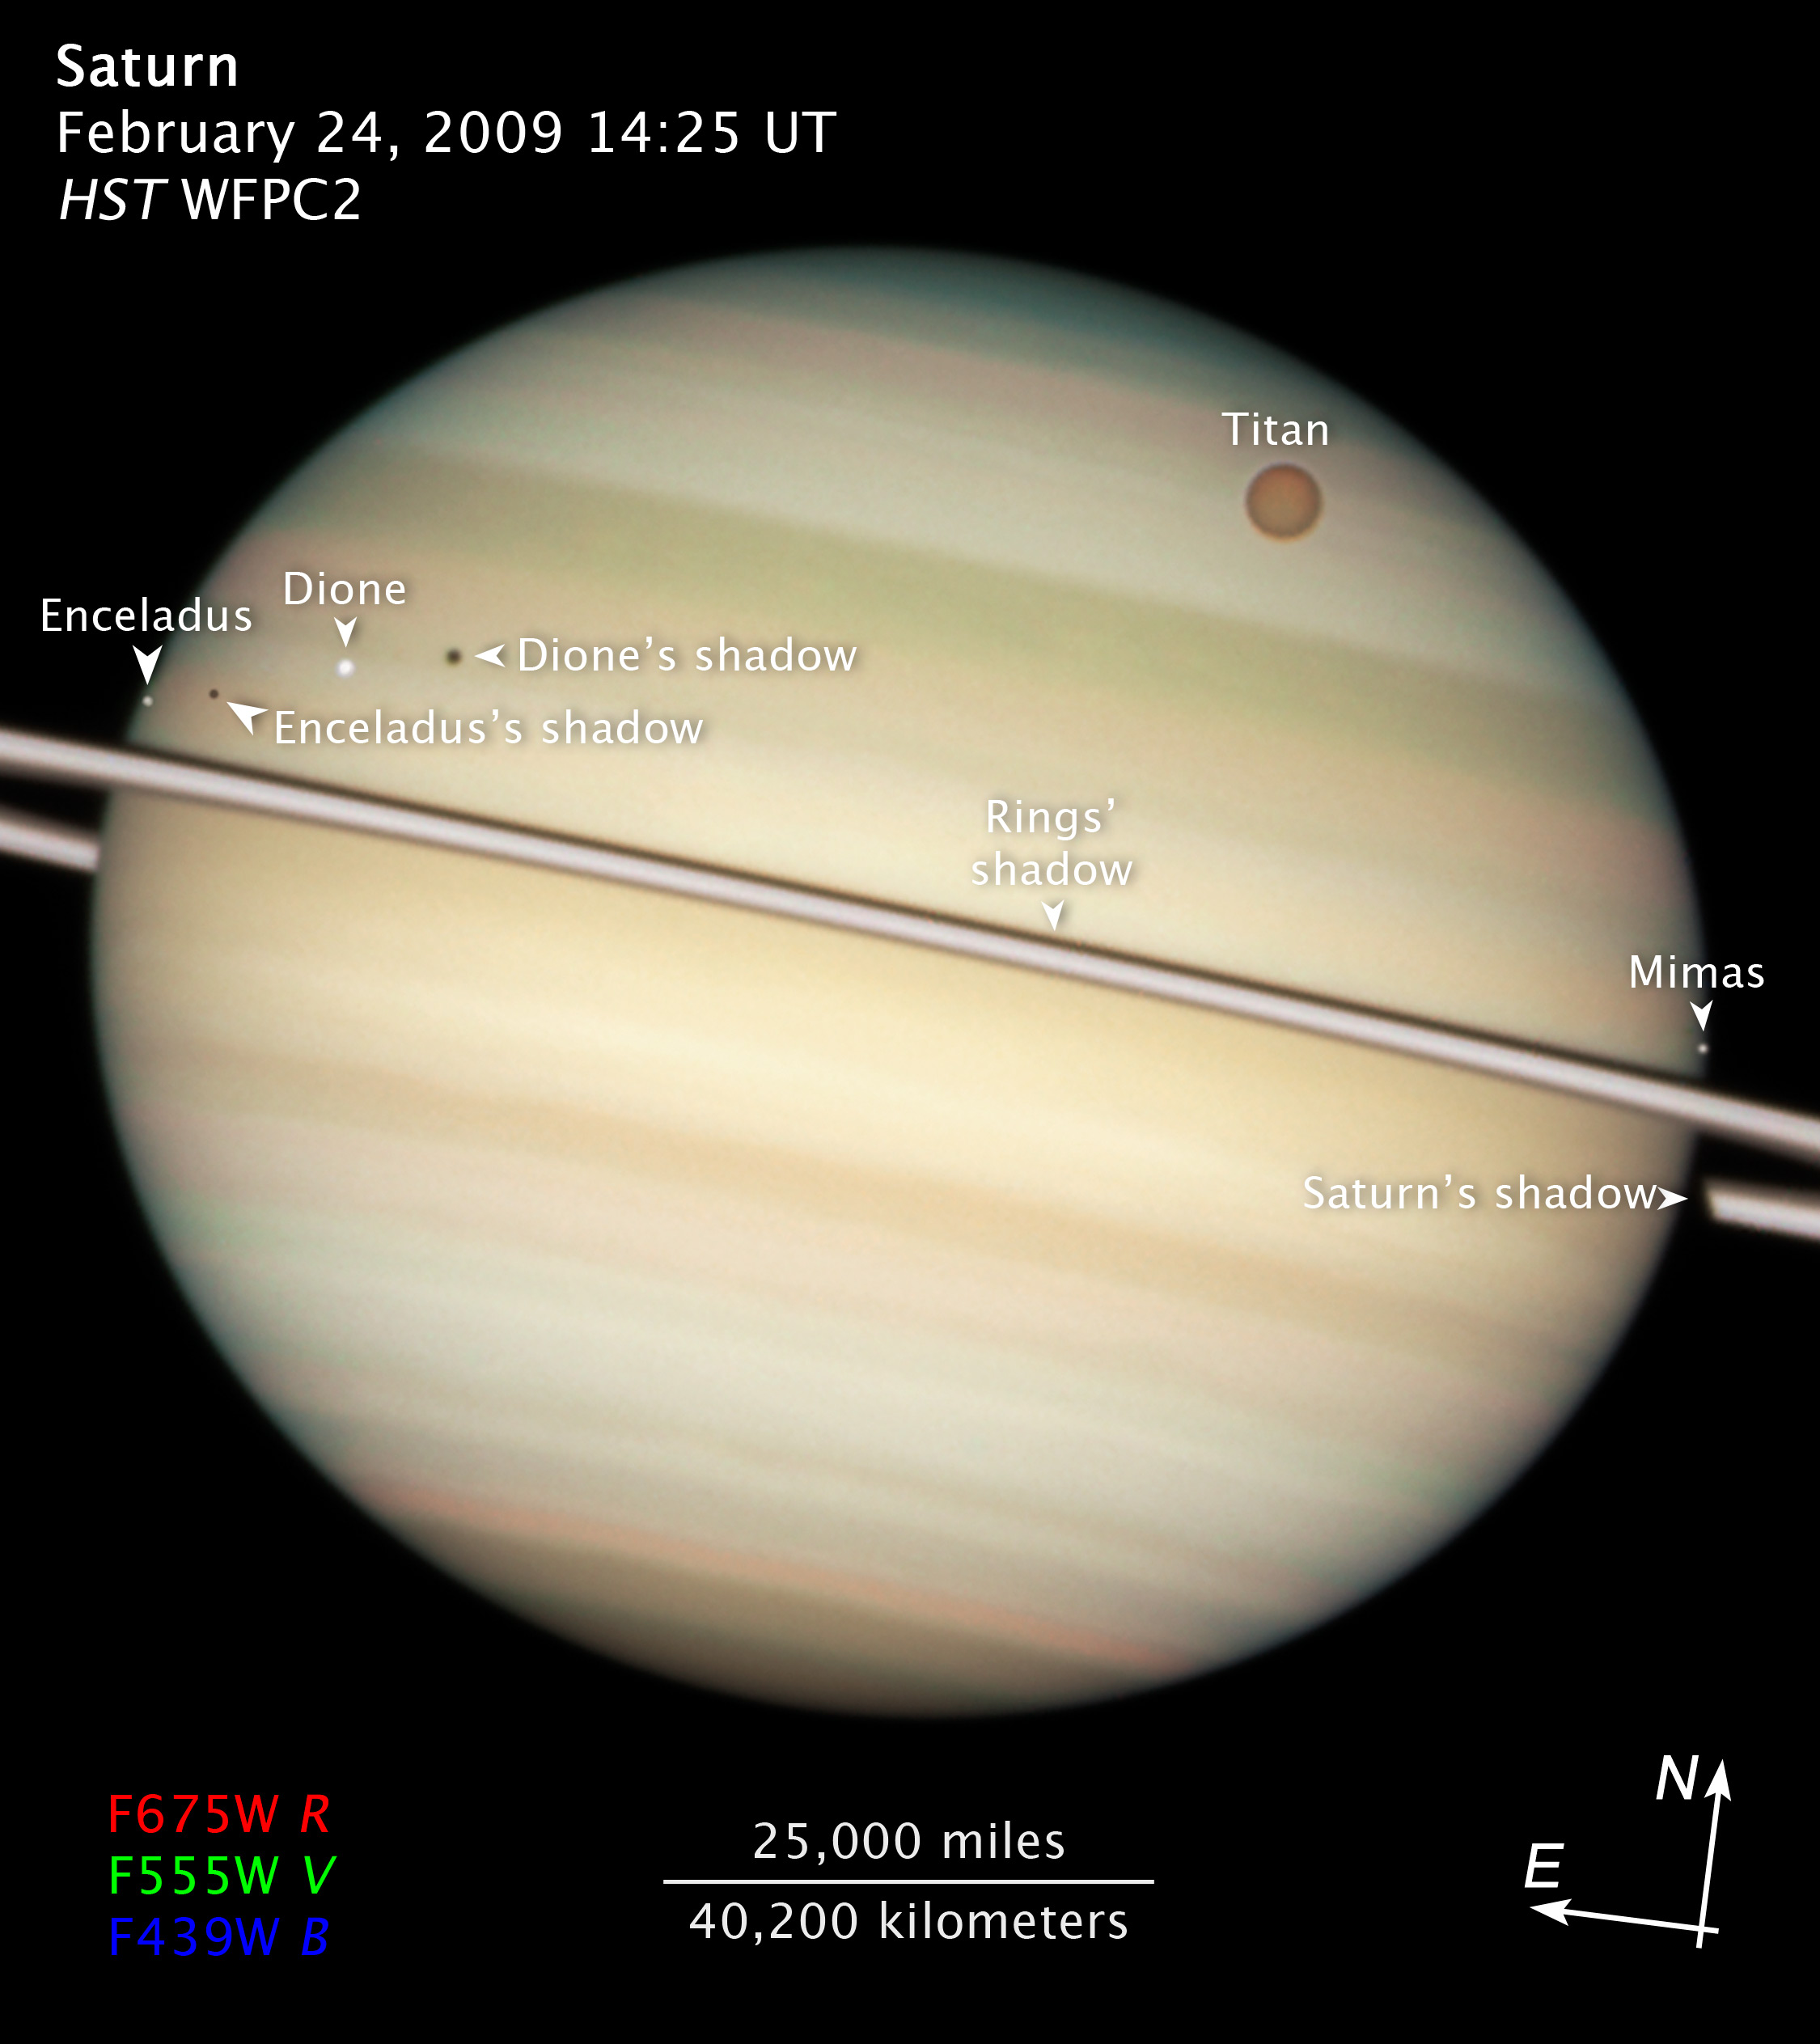

Compass and scale image of Saturn

This Hubble Space Telescope image taken on 24 February 2009, highlights four of Saturn's moons and their shadows as they pass by their parent planet.

Credit: NASA, ESA and the Hubble Heritage Team (STScI/AURA). Acknowledgment: M. Wong (STScI/UC Berkeley) and C. Go (Philippines)